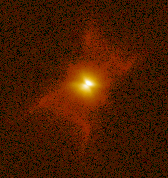

Red Rectangle

This image is a part of the Hubble Gallery of Planetary Nebulae.

Credit: Howard Bond (ST ScI) and NASA/ESA